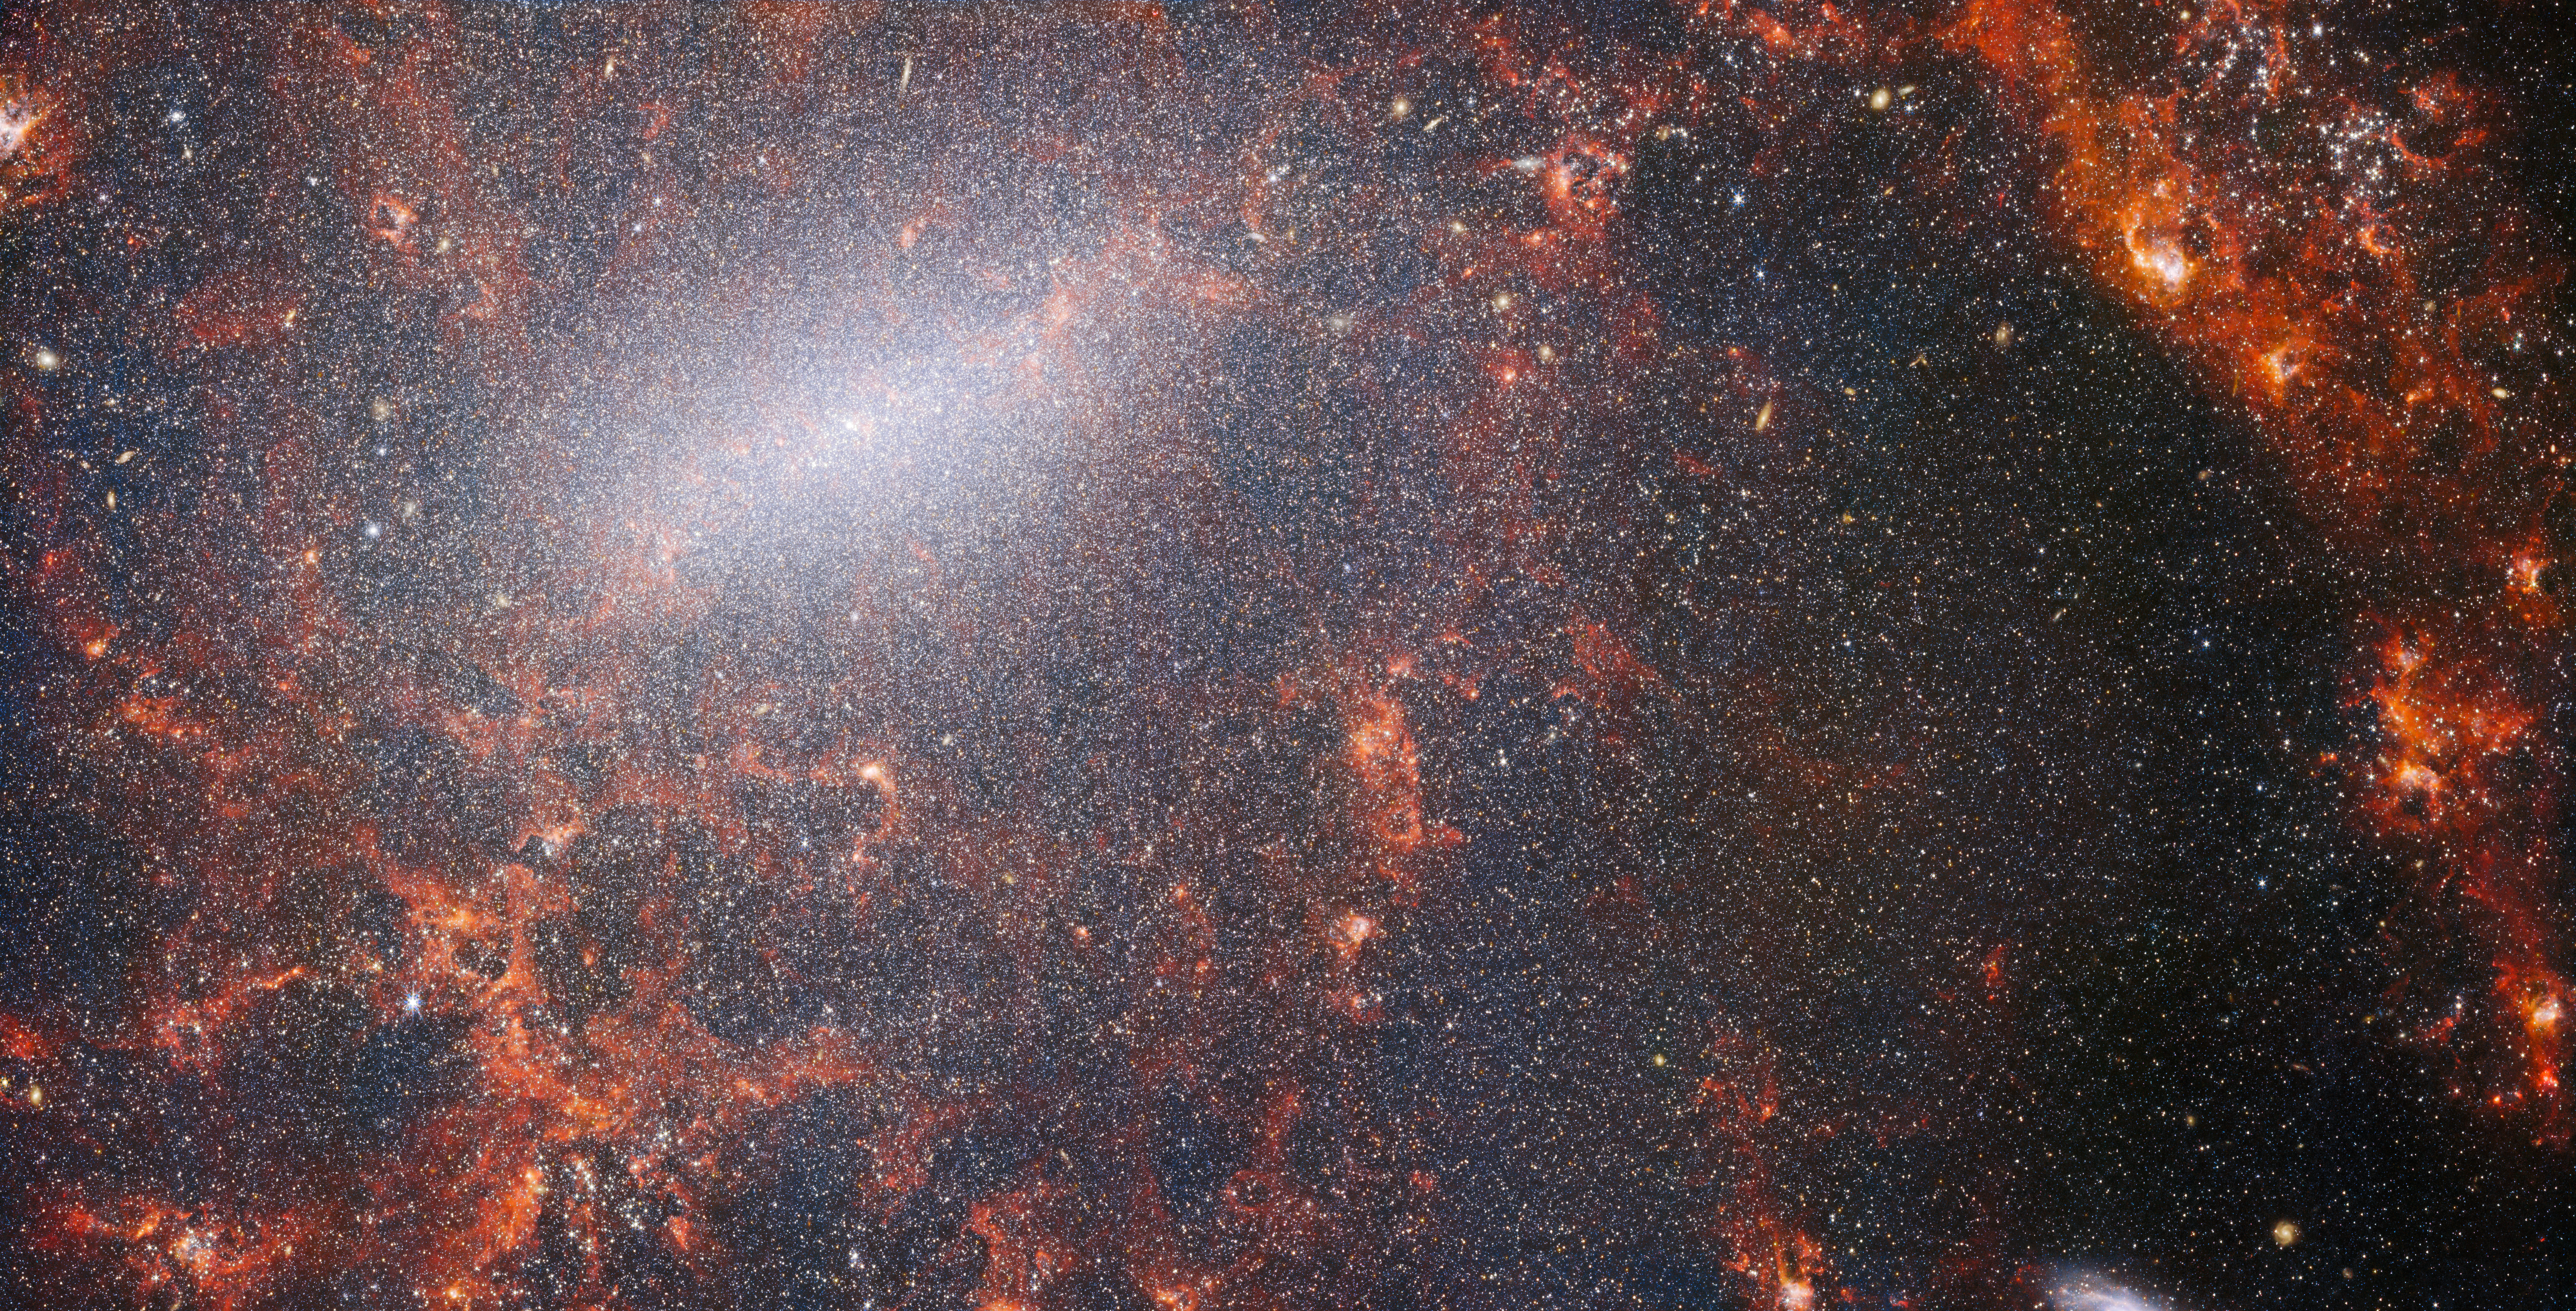

Webb's NIRCam peers behind bars

A delicate tracery of dust and bright star clusters threads across this image from the NASA/ESA/CSA James Webb Space Telescope. This view from Webb’s NIRCam instrument is studded by the galaxy’s massive population of stars, most dense along its bright central bar, along with burning red clouds of gas illuminated by young stars within. These glittering stars belong to the barred spiral galaxy NGC 5068, located around 17 million light-years from Earth in the constellation Virgo.

This portrait of NGC 5068 is part of a campaign to create an astronomical treasure trove, a repository of observations of star formation in nearby galaxies. Previous gems from this collection can be seen here and here. These observations are particularly valuable to astronomers for two reasons. The first is because star formation underpins so many fields in astronomy, from the physics of the tenuous plasma that lies between stars to the evolution of entire galaxies. By observing the formation of stars in nearby galaxies, astronomers hope to kick-start major scientific advances with some of the first available data from Webb.

The second reason is that Webb’s observations build on other studies using telescopes including the NASA/ESA Hubble Space Telescope and some of the world’s most capable ground-based observatories. Webb collected images of 19 nearby star-forming galaxies which astronomers could then combine with catalogues from Hubble of 10 000 star clusters, spectroscopic mapping of 20 000 star-forming emission nebulae from the Very Large Telescope (VLT), and observations of 12 000 dark, dense molecular clouds identified by the Atacama Large Millimeter/submillimeter Array (ALMA). These observations span the electromagnetic spectrum and give astronomers an unprecedented opportunity to piece together the minutiae of star formation.

This near-infrared image of the galaxy is filled by the enormous gathering of older stars which make up the core of NGC 5068. The keen vision of NIRCam allows astronomers to peer through the galaxy’s gas and dust to closely examine its stars. Dense and bright clouds of dust lie along the path of the spiral arms: within these are young, massive star clusters and H II regions, collections of hydrogen gas where new stars are forming. The young, energetic stars ionise the hydrogen around them which, when combined with hot dust emission, creates this reddish glow. YOung star-forming regions are a fascinating target for astronomers, and Webb’s instruments are the perfect tools to examine them, resulting in this image.

Credit: ESA/Webb, NASA & CSA, J. Lee and the PHANGS-JWST Team